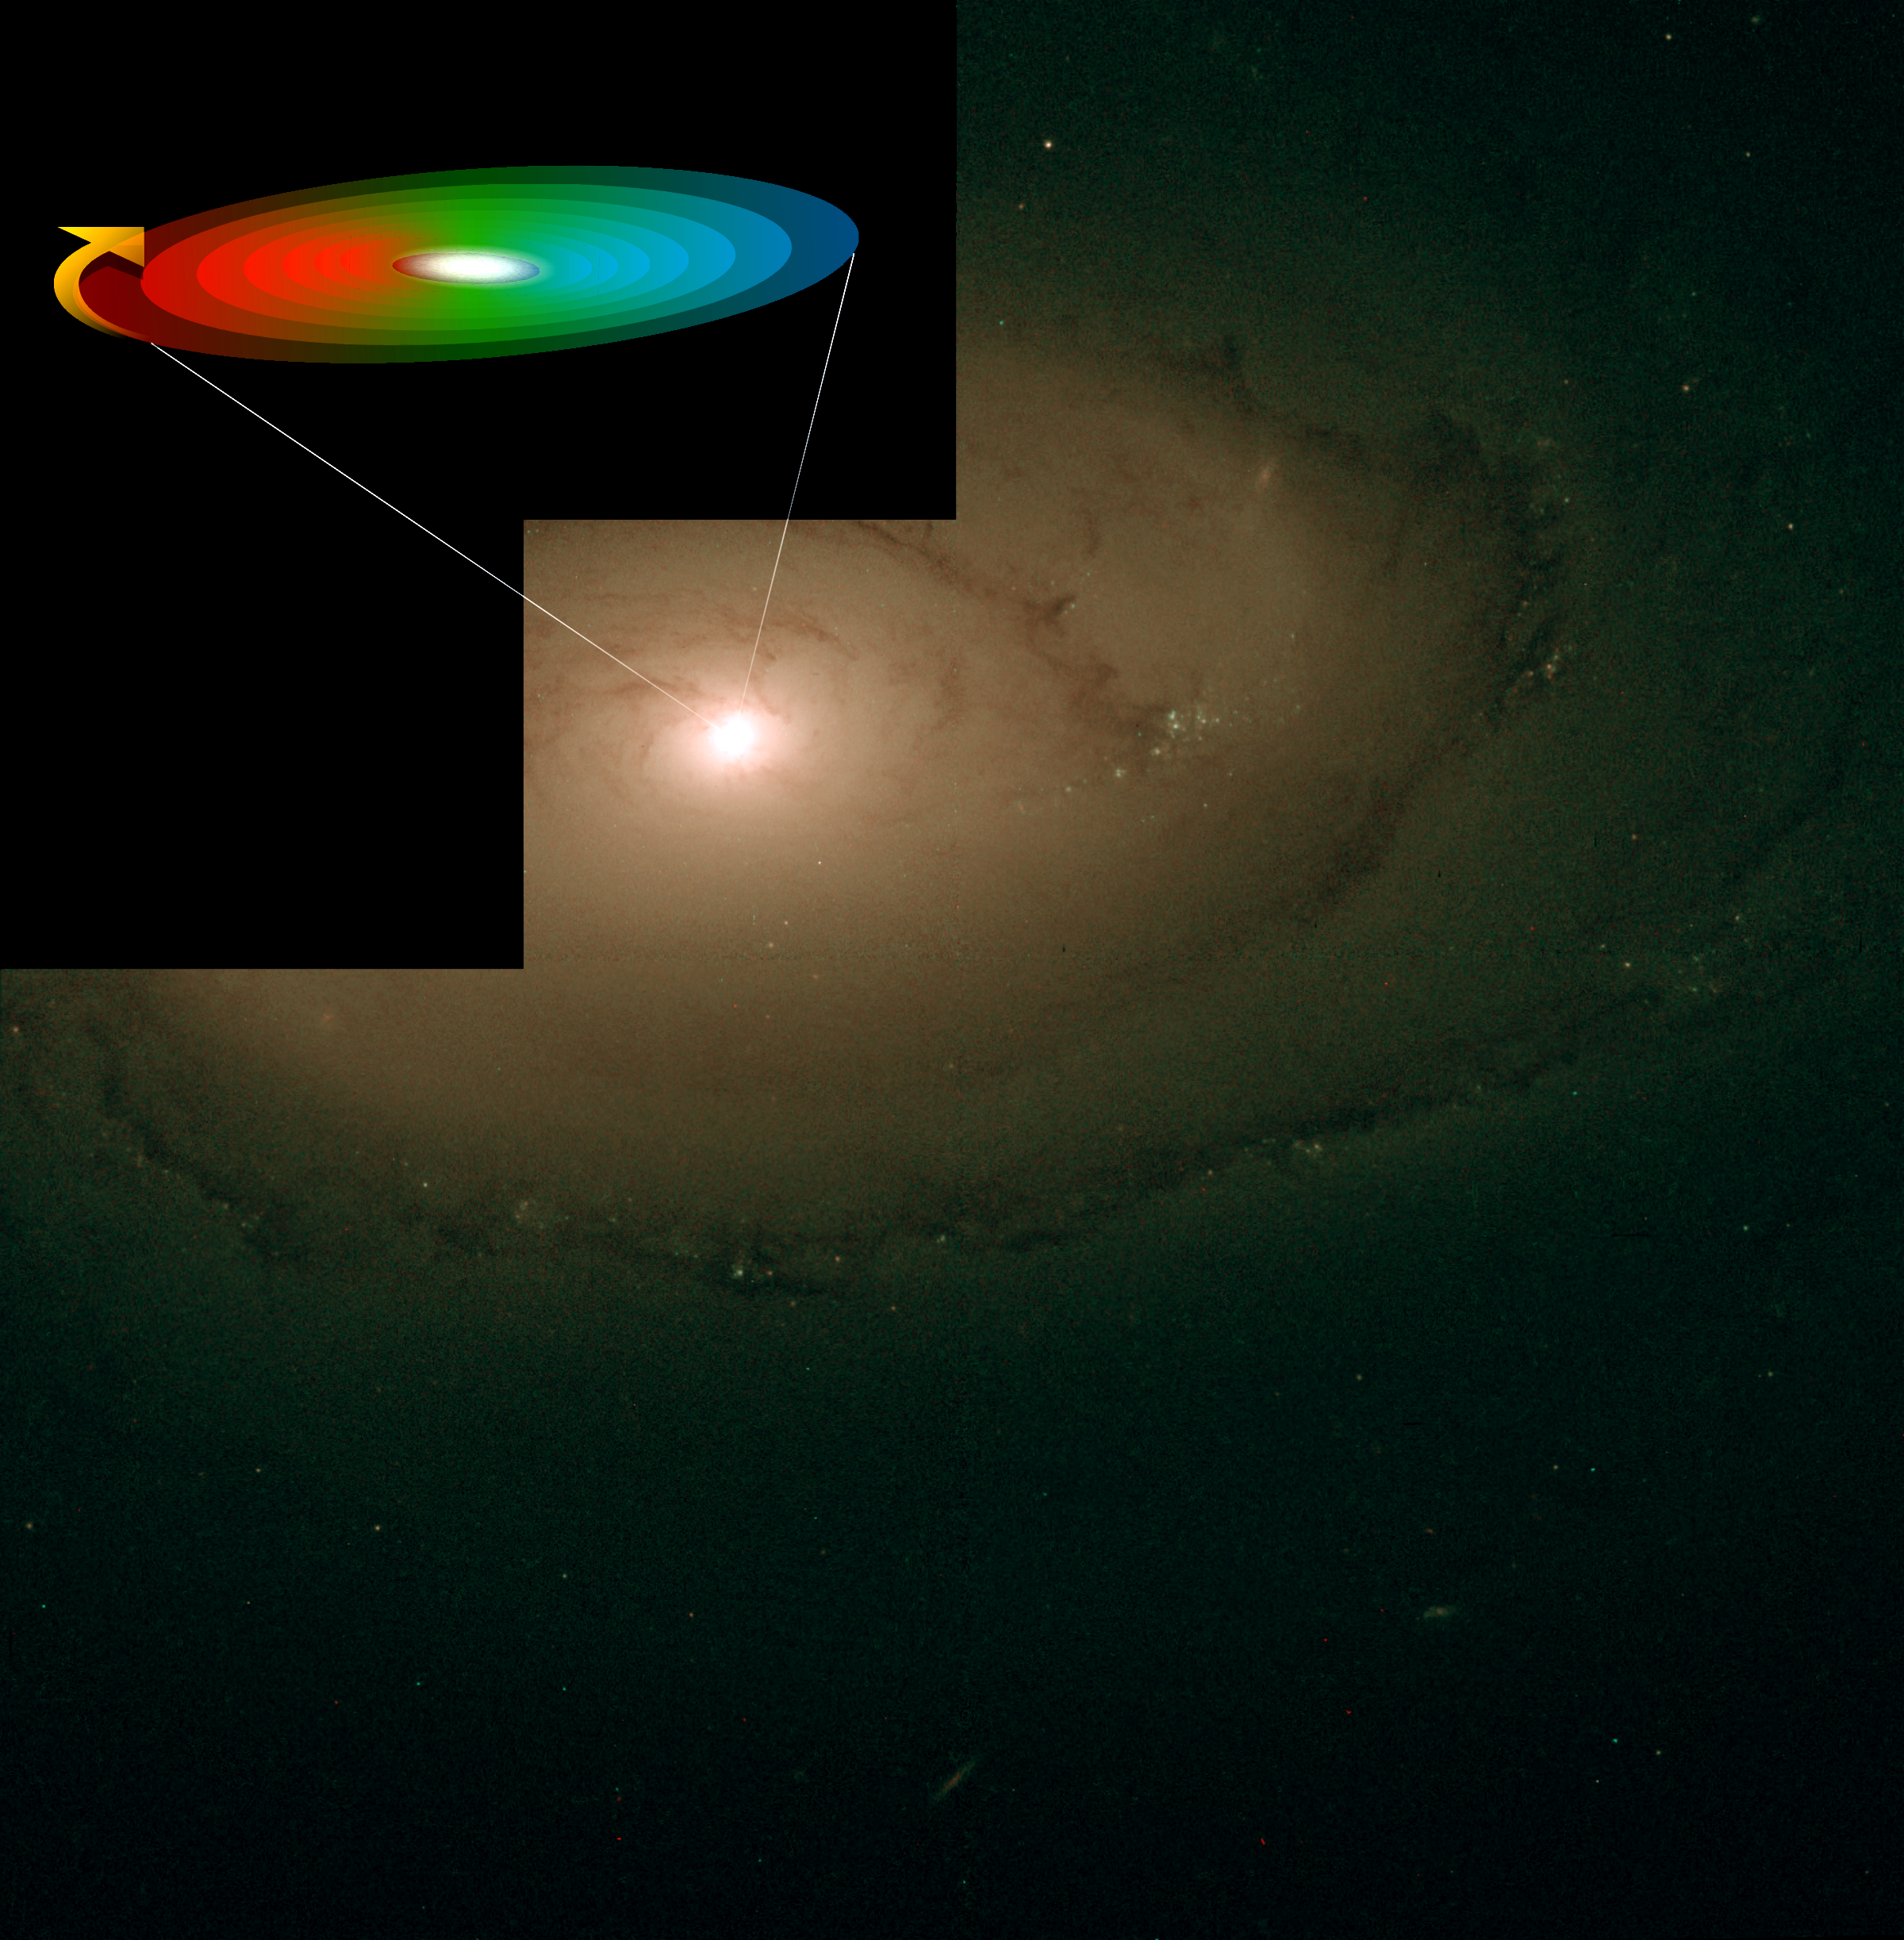

Swirling Gas Disk around Black Hole in Galaxy NGC 4450

The nearby spiral galaxy NGC 4450 is one of the galaxies in which Hans-Walter Rix and collaborators have identified a supermassive black hole. The picture reveals nothing unusual in the galaxy centre. Yet, the group of astronomers have measured wildly rotating gas in a disk around the centre of the galaxy with the STIS instrument onboard Hubble (illustrated in the upper left corner). There the gas is moving thirty times faster than anywhere else in the galaxy. This gas rotation centred on the black hole is illustrated with colours. Red is receding gas and blue is approaching gas. These colours correspond to the physical effect of Doppler shift also known as redshift in astronomy.

The image of NGC 4450 was gathered with another of Hubble’s instruments, WFPC2. The image is a chromatic composite of two individual exposures in blue-green light and in red light.

Credit: ESA HEIC/Hans-Walter Rix